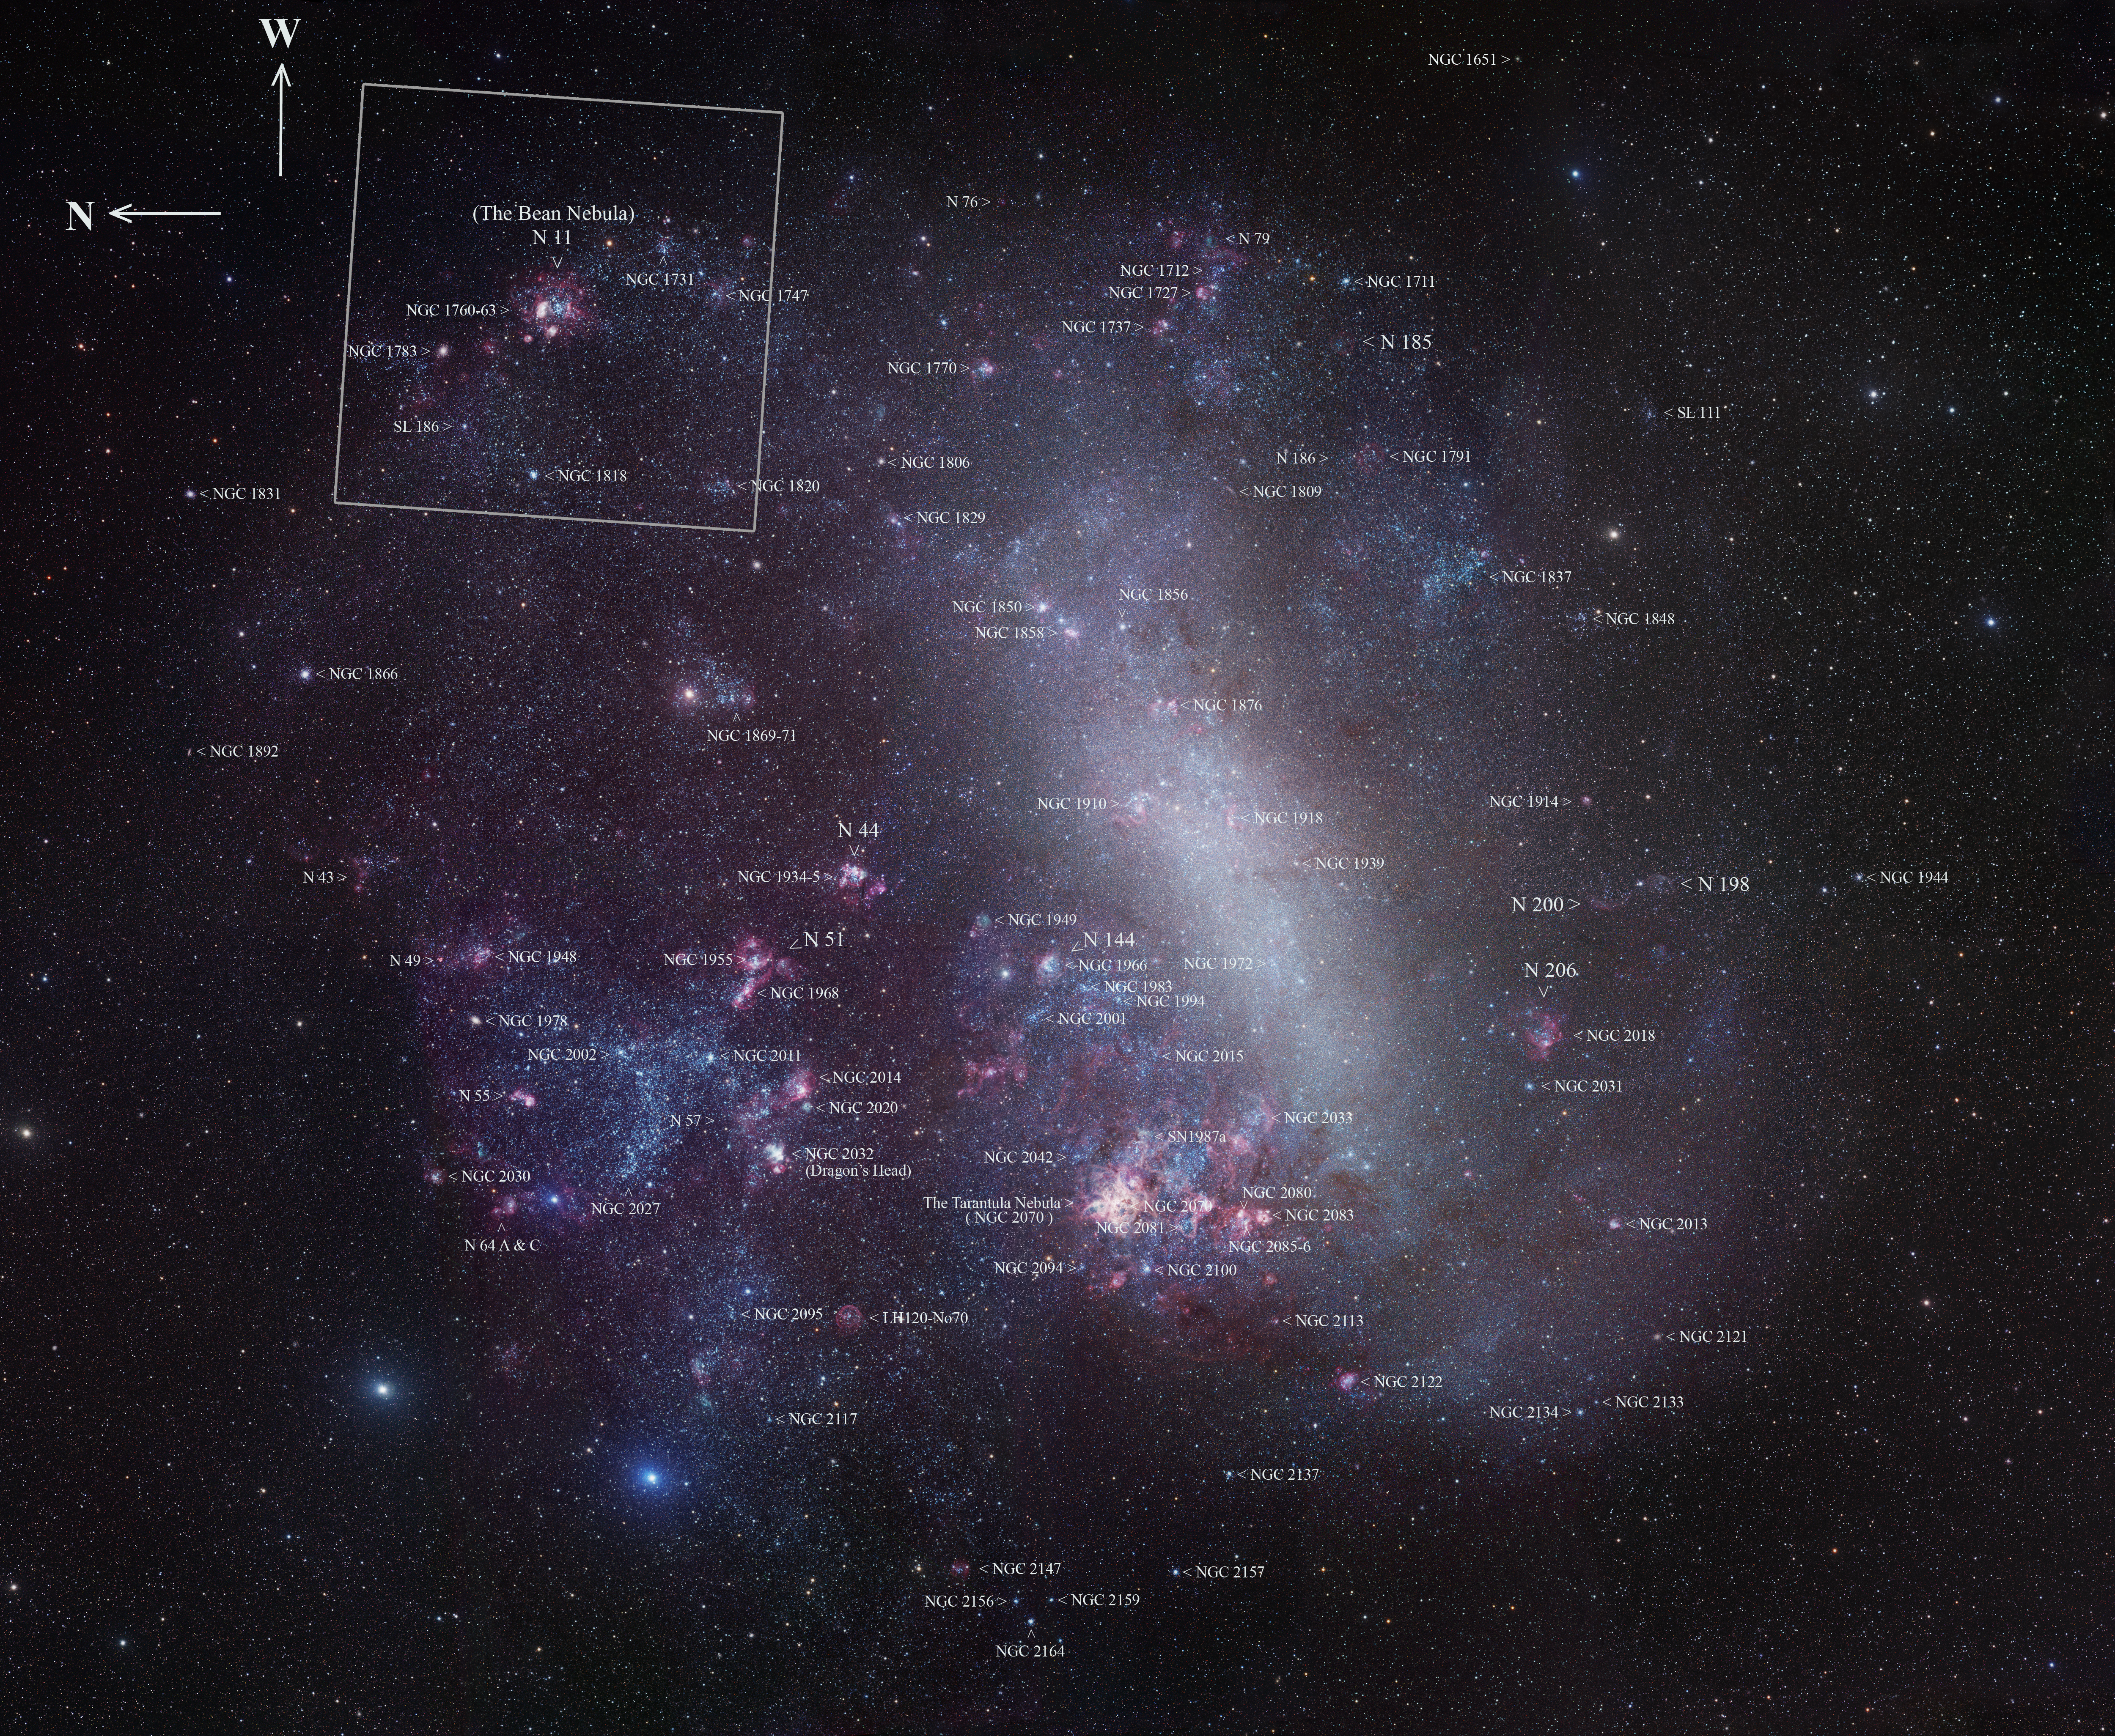

The entire Large Magellanic Cloud with annotations (ground-based image)

This image shows the entire Large Magellanic Cloud, with some of the brightest objects marked. The outline shown corresponds to the overview image from Digitized Sky Survey 2. The field of view is about ten degrees across.

Credit: Robert Gendler/ESO